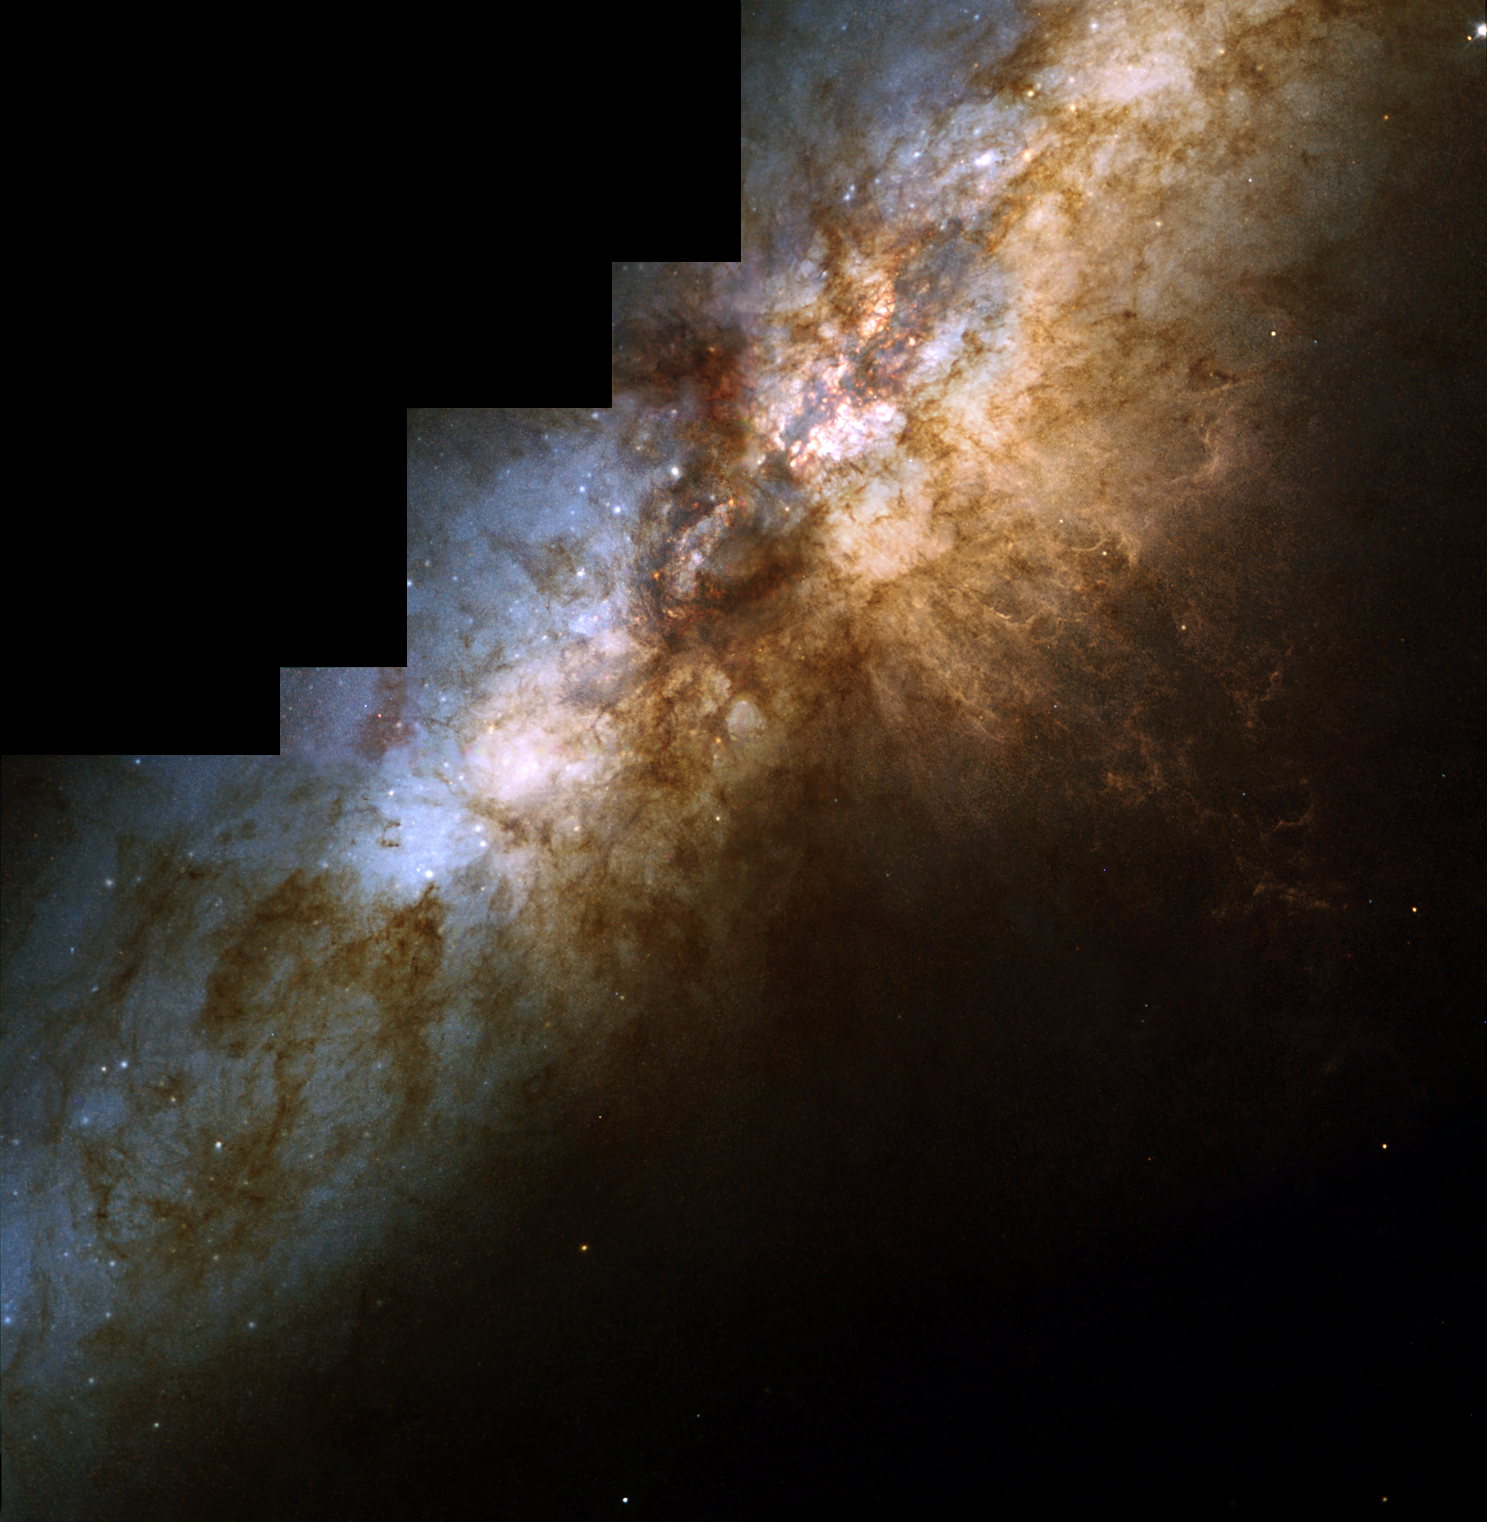

Hubble spies huge clusters of stars formed by ancient encounter

This stunningly beautiful image taken with the NASA/ESA Hubble Space Telescope shows the heart of the prototypical starburst galaxy M82. The ongoing violent star formation due to an ancient encounter with its large galactic neighbour, M81, gives this galaxy its disturbed appearance. In the image, taken by Hubble's Wide Field and Planetary Camera 2, the huge lanes of dust that crisscross M82's disk are another telltale sign of the flurry of star formation. Below the centre and to the right, a strong galactic wind is spewing knotty filaments of hydrogen and nitrogen gas. More than 100 super star clusters - very bright, compact groupings of about 100, 000 stars - are seen in this detailed Hubble picture as white dots sprinkled throughout M82's central region. The dark region just above the centre of the picture is a huge dust cloud. A collaboration of European and American scientists used these clusters to date the ancient interaction between M82 and M81. About 600 million years ago, a region called 'M82 B' (the bright area just below and to the left of the central dust cloud) exploded with new stars. Scientists have discovered that this ancient starburst was triggered by the violent encounter with M81. M82 is a bright (eighth magnitude), nearby (12 million light-years from Earth) galaxy in the constellation Ursa Major (the Great Bear). The Hubble picture was taken on September 15, 1997. The natural-colour composite was constructed from three Wide Field and Planetary Camera 2 exposures, which were combined in chromatic order: 4, 250 seconds through a blue filter (428 nm); 2, 800 seconds through a green filter (520 nm); and 2, 200 seconds through a red (820 nm) filter. This image is issued jointly by NASA and ESA.

Credit: NASA, ESA & R. de Grijs (Institute of Astronomy, Cambridge, UK)